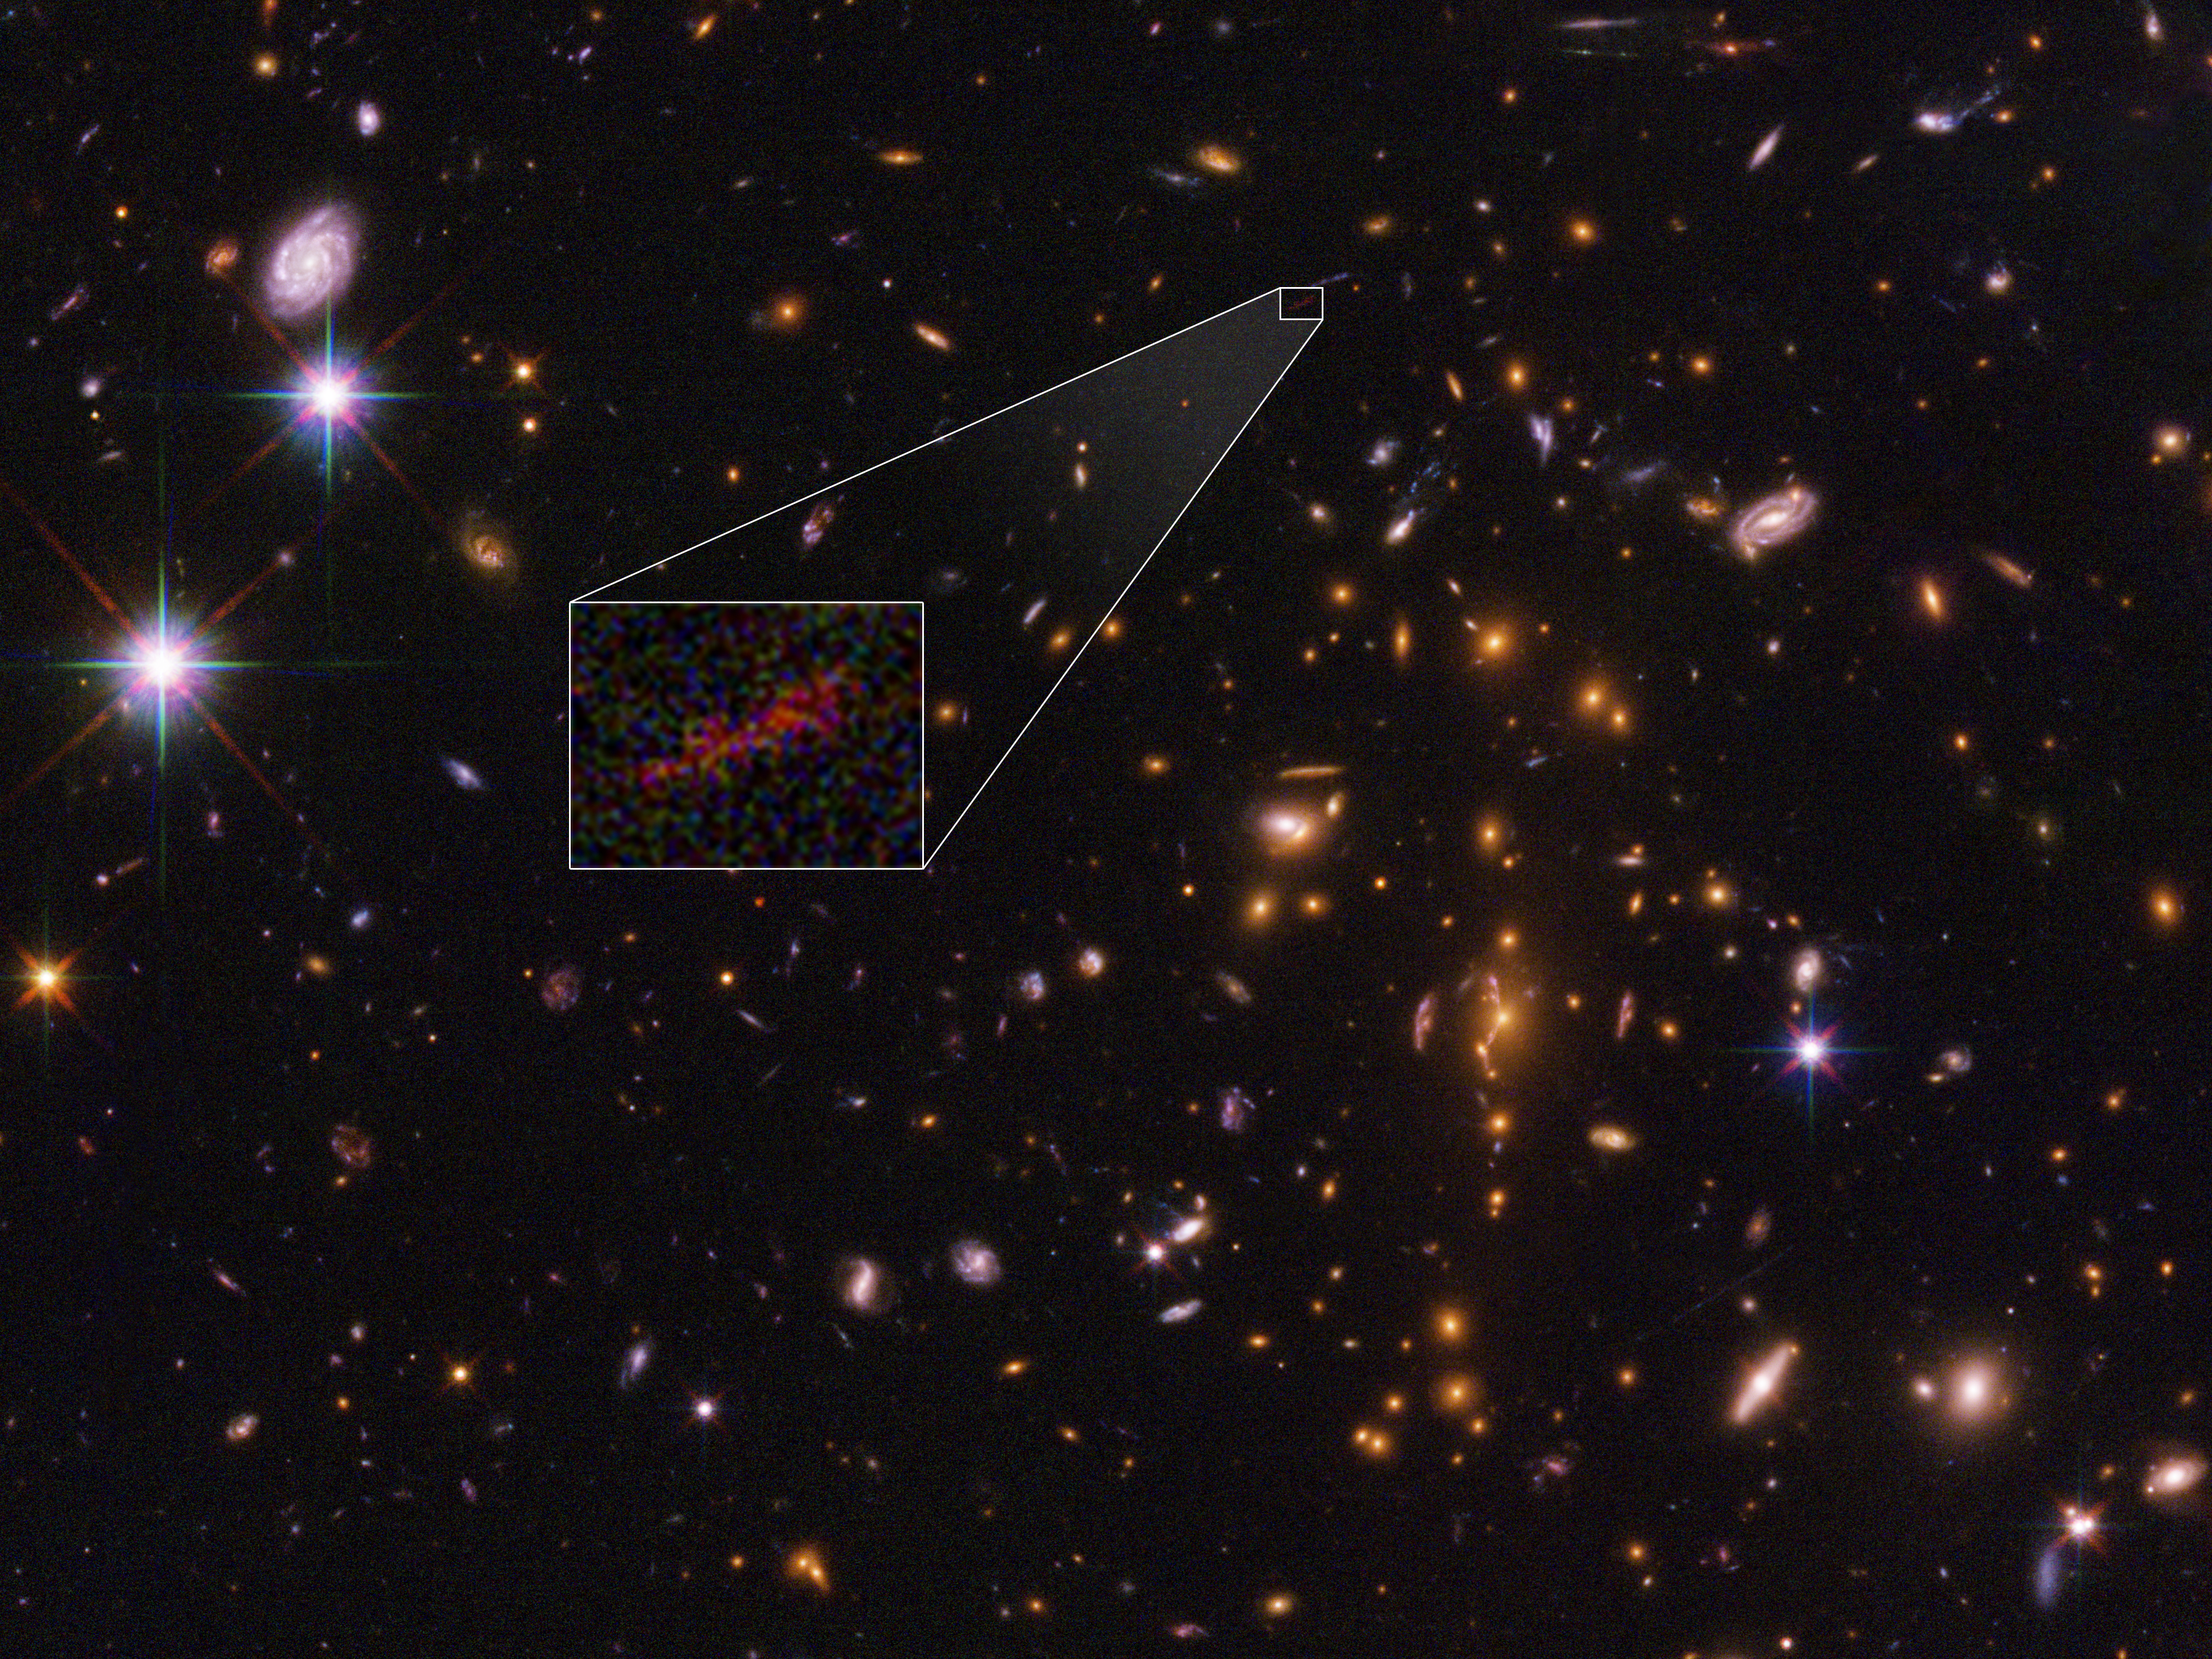

Stretched out image of distant galaxy

This is an image from the NASA/ESA Hubble Space Telescope of the farthest galaxy yet seen in an image that has been stretched and amplified by a phenomenon called gravitational lensing. The embryonic galaxy, named SPT0615-JD, existed when the Universe was just 500 million years old. Though a few other primitive galaxies have been seen at this early epoch, they have essentially all looked like red dots, given their small size and tremendous distances.

However, in this case, the gravitational field of a massive foreground galaxy cluster, called SPT-CL J0615-5746, not only amplified the light from the background galaxy but also smeared the image of it into an arc (about 2 arcseconds long). Image analysis shows that the galaxy weighs in at no more than 3 billion solar masses (roughly 1/100th the mass of our Milky Way galaxy). It is less than 2500 light-years across, half the size of the Small Magellanic Cloud, a satellite galaxy of the Milky Way. The object is considered prototypical of young galaxies that emerged during the epoch shortly after the Big Bang.

Credit: NASA , ESA, and B. Salmon (STScI)